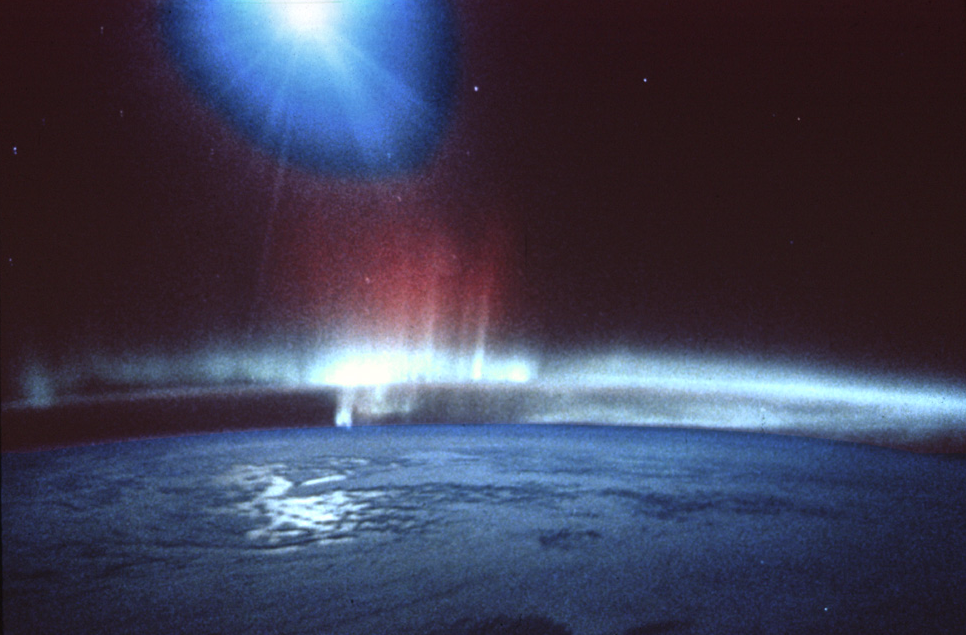

Shuttle Photos Of Earth's Auroras

The charged particles from the Sun strike Earth's magnetosphere and are captured by one of the Shuttle's on board cameras.

Credit: NASA & ESA